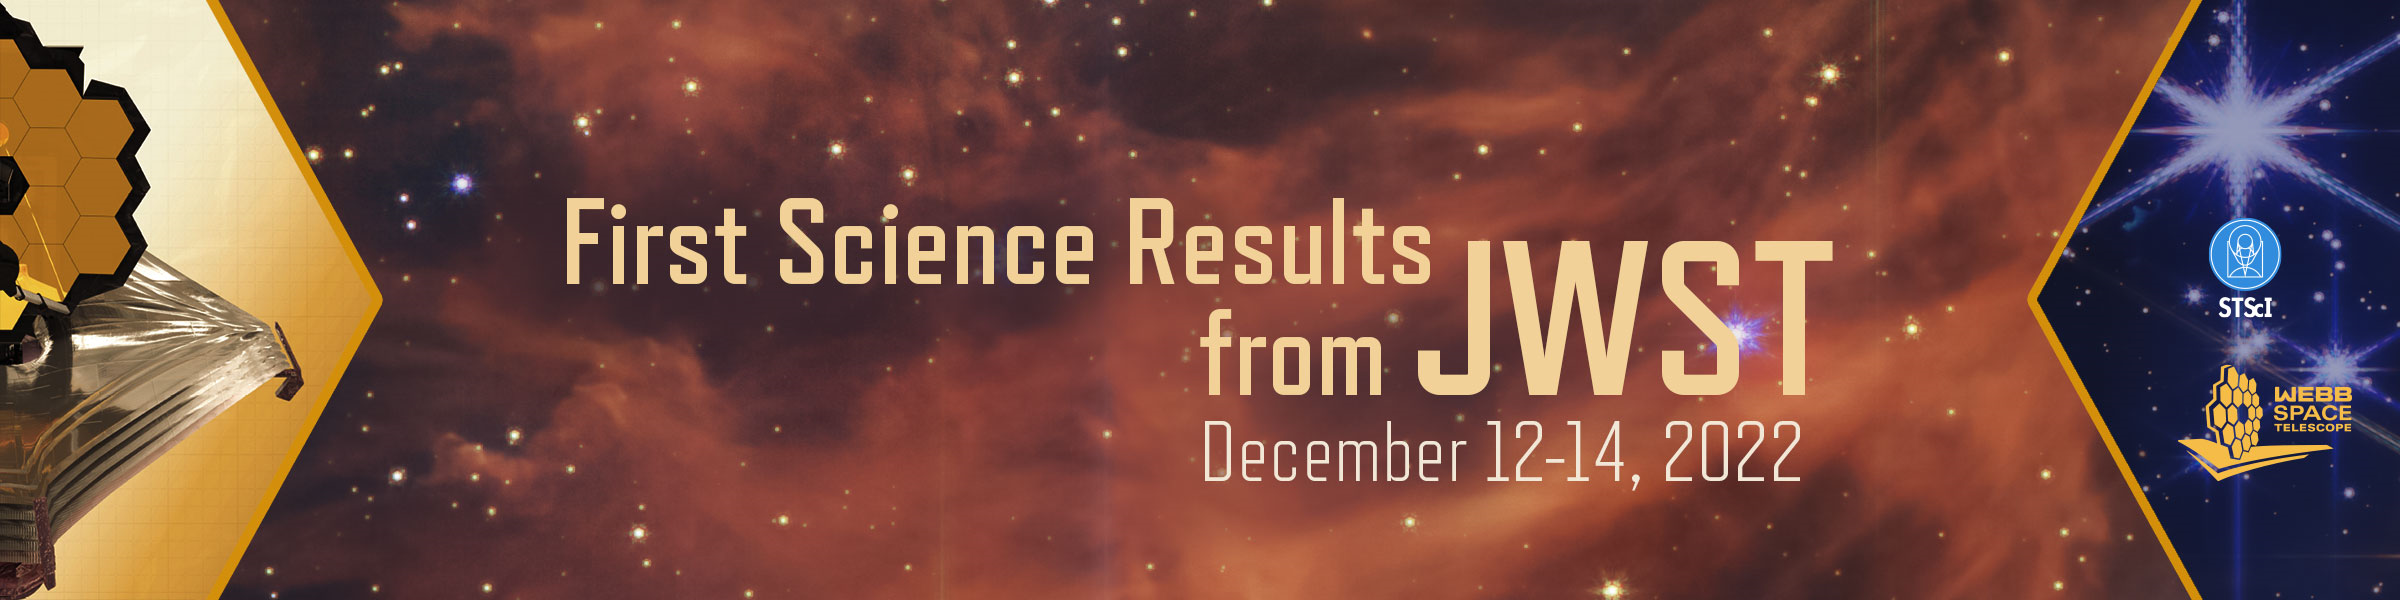

First Results from JWST Conference

The First Results from JWST Conference will be held on 12–14 December 2022 at the Space Telescope Science Institute in Baltimore, Maryland, USA.

Credit: NASA & ESA